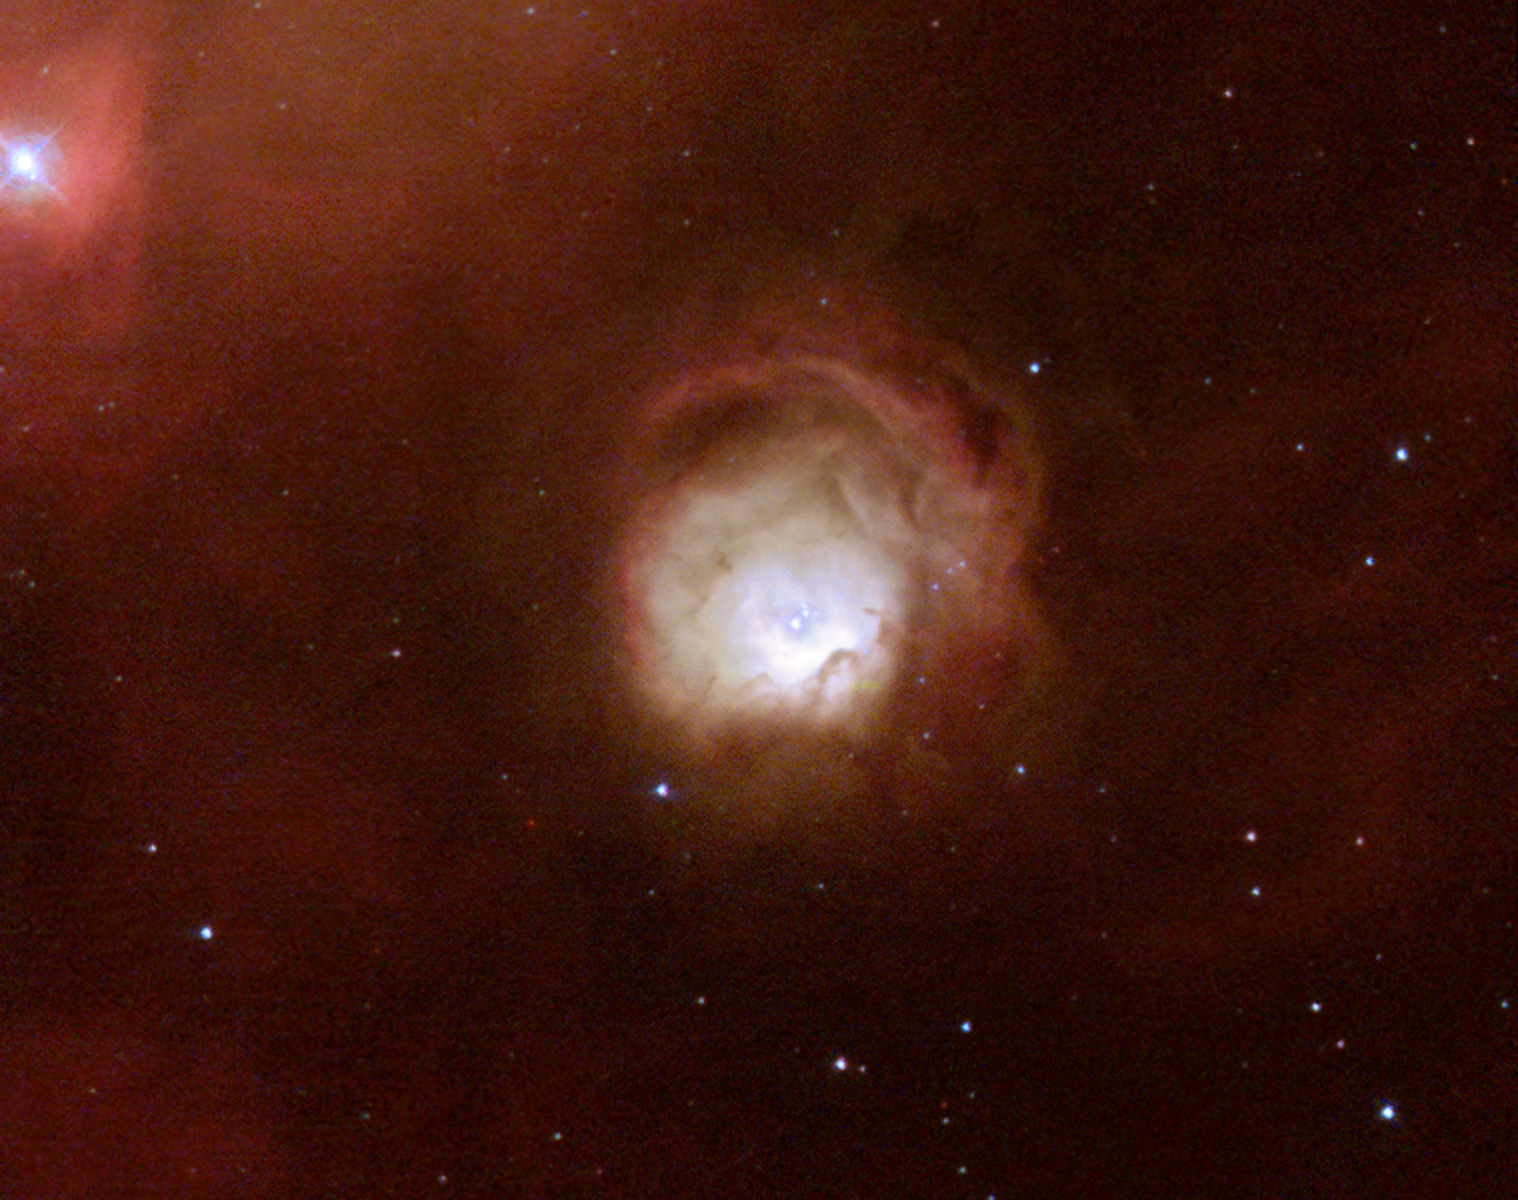

A rose blooming in space

Resembling a delicate rose floating in space, the nebula N11A is seen in a new light in a true-colour image taken by the NASA/ESA Hubble Space Telescope. Fierce radiation from massive stars embedded at the centre of N11A illuminates the surrounding gas with a soft fluorescent glow. N11A lies within a spectacular star-forming region in the Large Magellanic Cloud, a small nearby companion galaxy to our own Milky Way Galaxy, visible from the Southern Hemisphere. This nebula is particularly interesting for astronomers since it is the smallest and most compact nebula in that region and represents the most recent massive star formation event there. The excellent imaging power of Hubble has enabled astronomers to see this nebula in more detail and to study the structure of the hot gas envelope as well as the stars embedded in its centre. Shocks and strong stellar winds from the recently born, massive stars in the bright core of N11A have scooped out a cavity in the gas and dust. The fierce radiation causes the surrounding gas to fluoresce in a way similar to a neon light. Hubble's image provides a much clearer picture of the nebula, making it possible for the first time to identify the stars that actually make it glow. Such information is essential for a better understanding of the formation of massive stars, that is, stars more than 10 times as heavy as our Sun. 'We need to study the properties of star-forming regions in our neighbouring galaxies to understand how stars are formed in the distant, young Universe, ' explains Mohammad Heydari-Malayeri who led the team studying these Hubble observations.

Credit: European Space Agency & Mohammad Heydari-Malayeri (Observatoire de Paris, France)